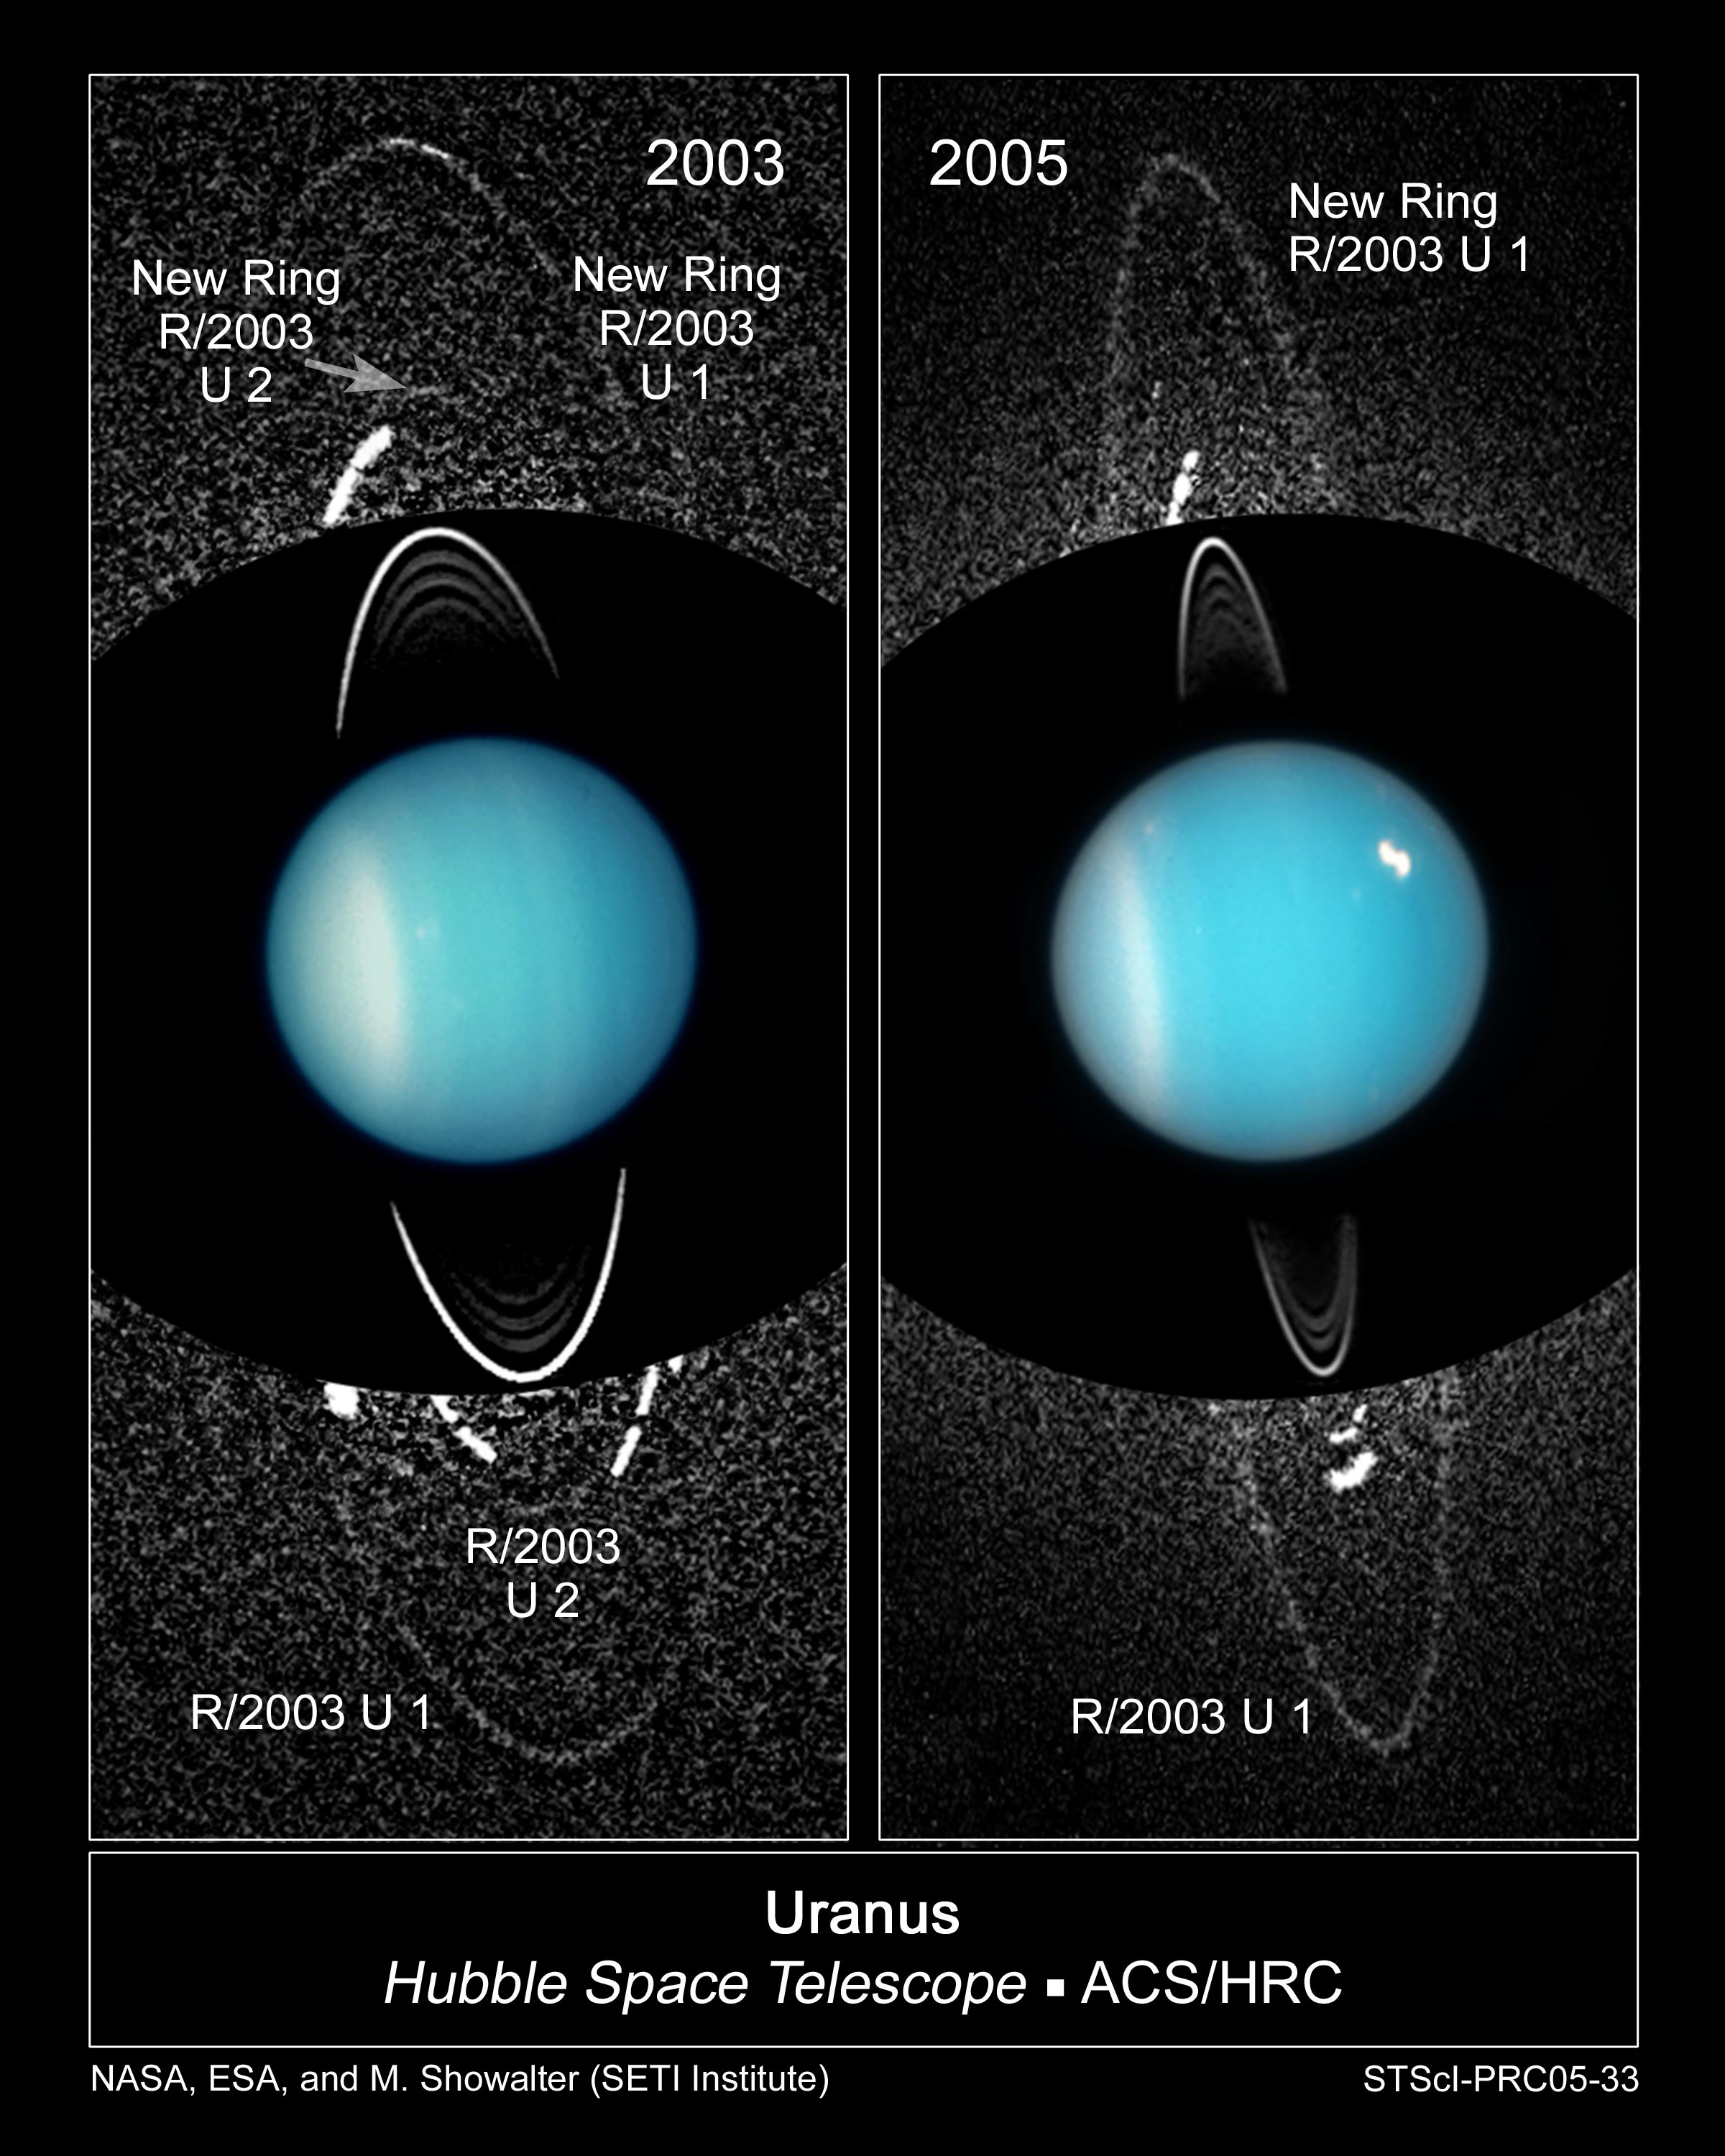

Newly Discovered Moon and Rings of Uranus

These composite images from several observations by NASA/ESA Hubble Space Telescope reveal a pair of newly discovered rings encircling the planet Uranus. The left composite image is made from Hubble data taken in 2003. The new dusty rings are extremely faint and required long exposures to capture their image. The background speckle pattern is noise in the image. The outermost ring (R/2003 U 1) is likely replenished by dust blasted off a newly discovered satellite called Mab, embedded in the ring and visible as a bright streak at the top of the outer ring. The new outermost ring is twice the radius of the previously known ring system around Uranus, as seen near image center. (The inner rings are much brighter, so no noise is visible in the background). Approximately halfway between the outermost ring and inner ring system is a second newly discovered ring (R/2003 U2). Only a faint segment of it appears at the 12:00 o'clock position. Because of the long exposures, the moons are smeared out and appear as arcs within the ring system.

Credit: NASA, ESA, and M. Showalter (SETI Institute)